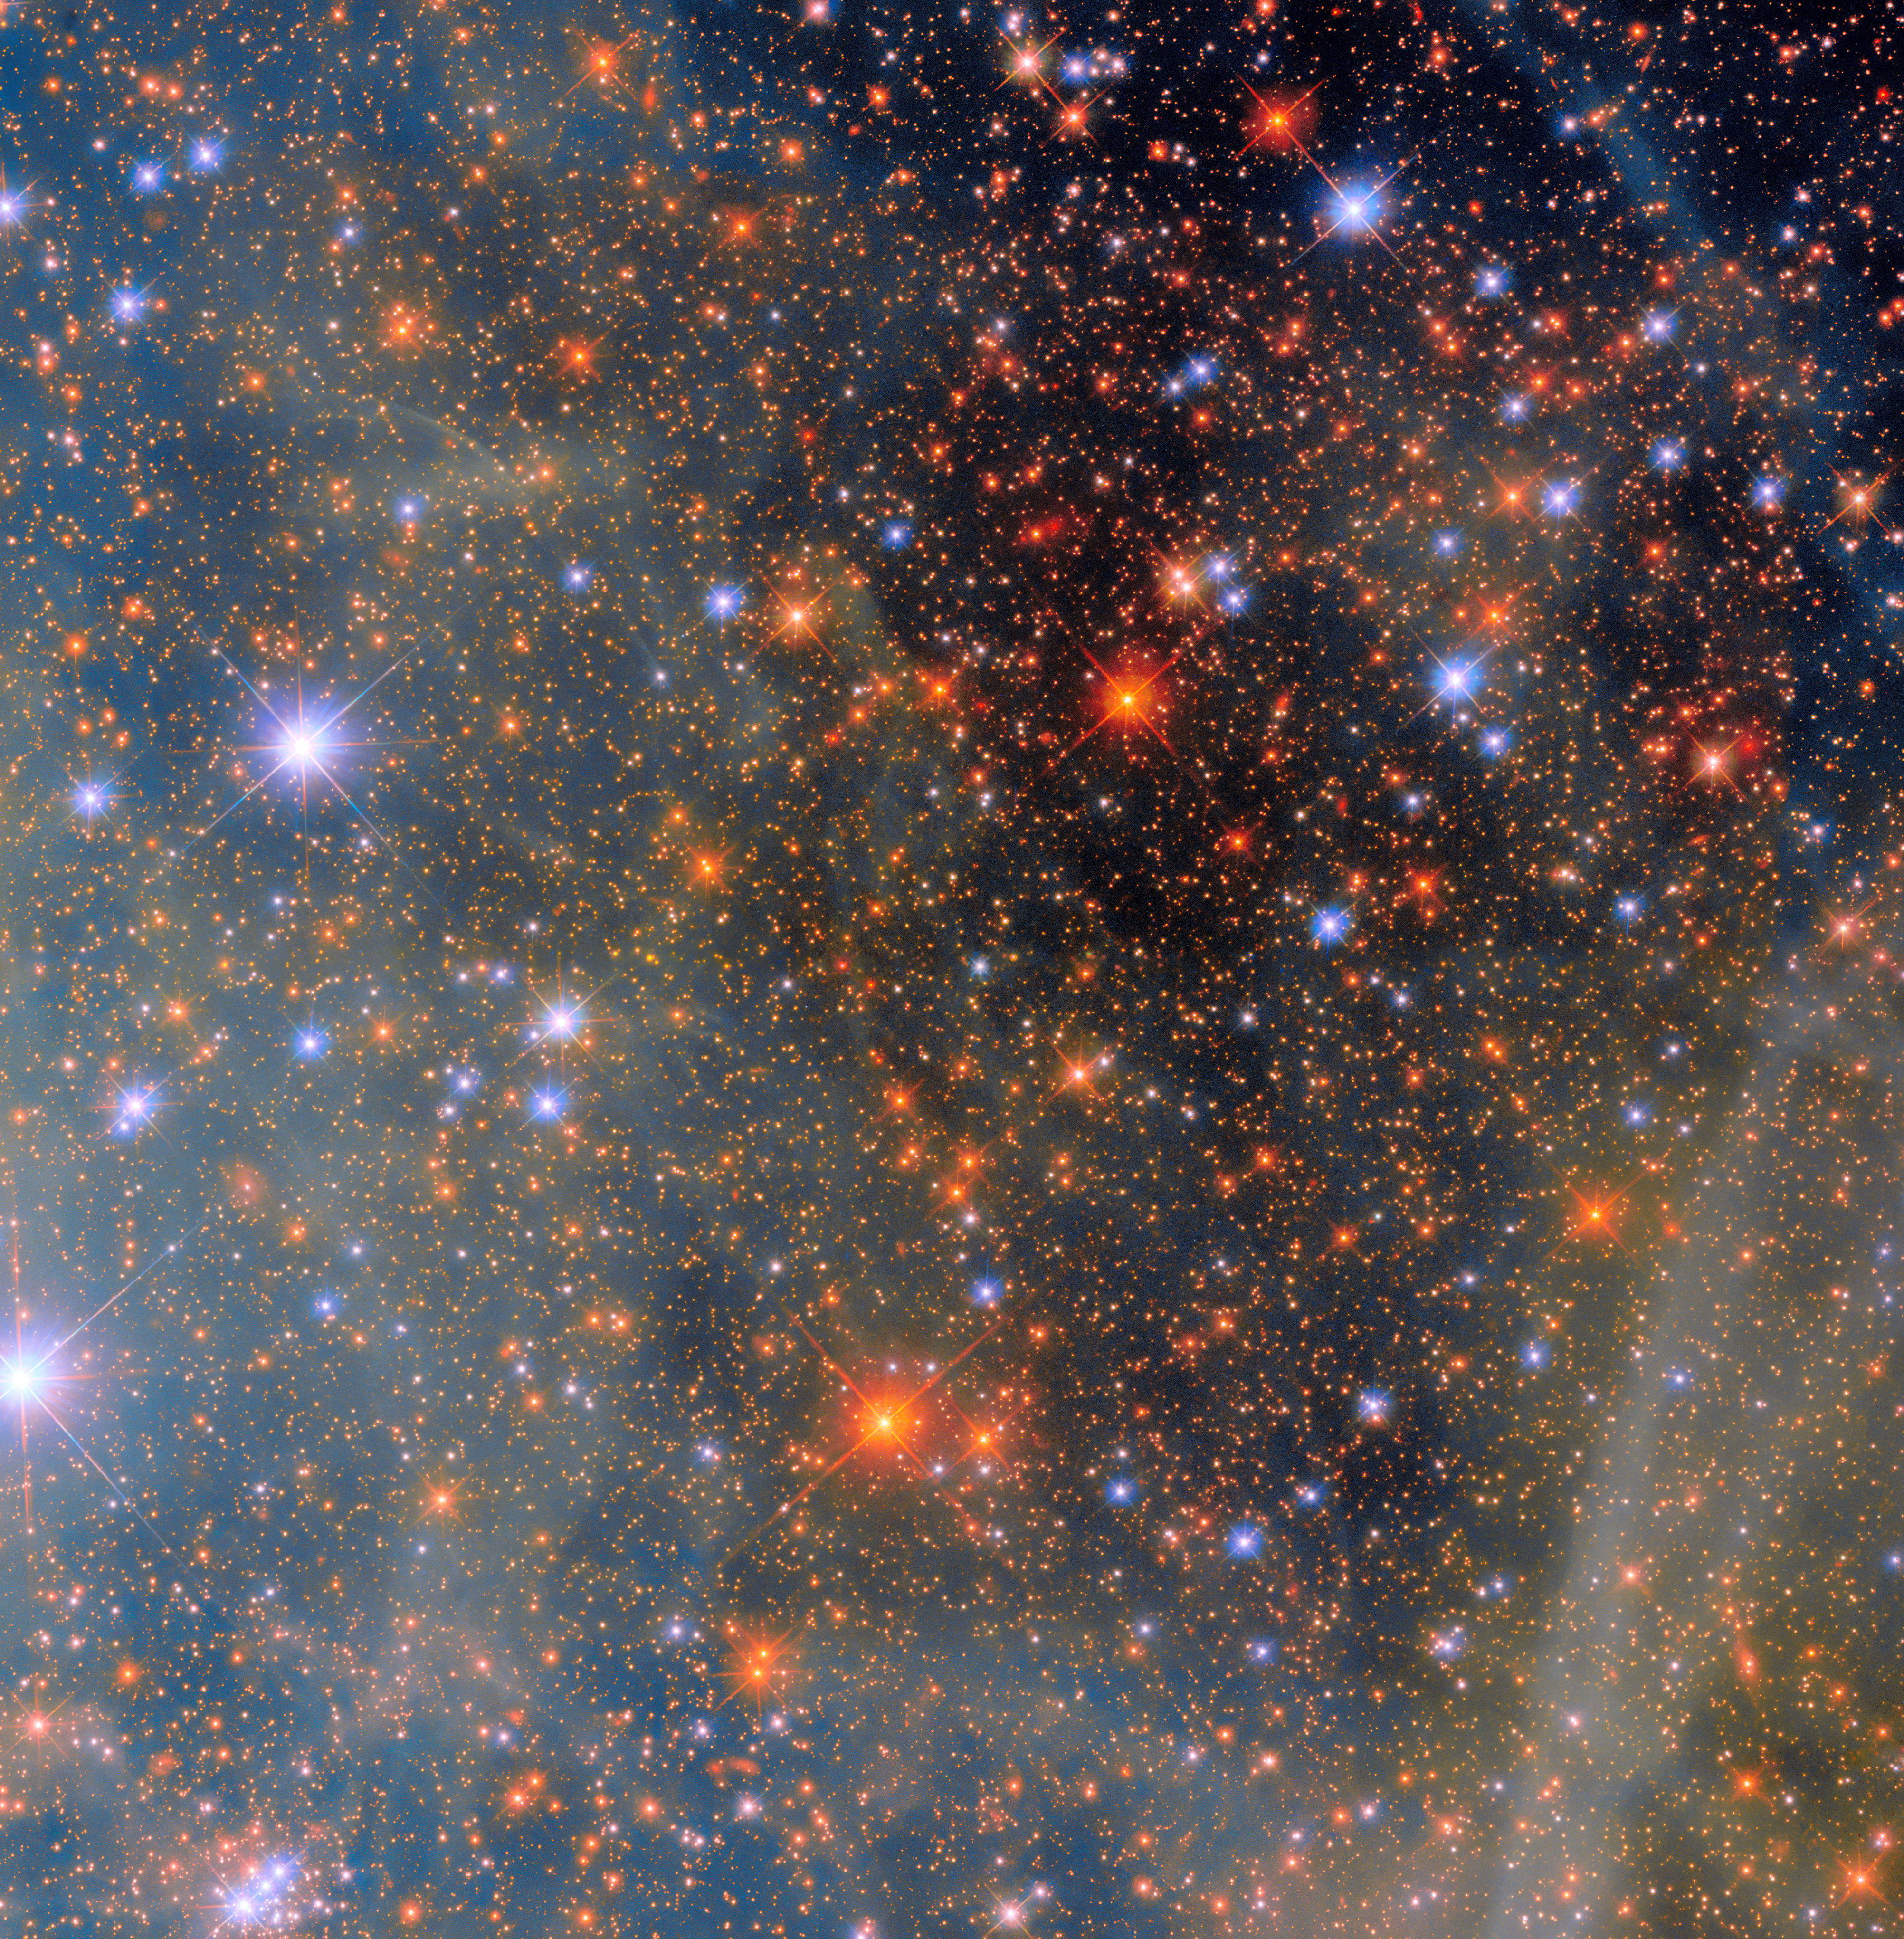

Colourful clouds of a nearby neighbour

Say hello to one of the Milky Way’s neighbours! Today’s NASA/ESA Hubble Space Telescope Picture of the Week features a scene from one of the closest galaxies to the Milky Way, the Small Magellanic Cloud (SMC). The SMC is a dwarf galaxy located about 200 000 light-years away. Most of the galaxy resides in the constellation Tucana, but a small section crosses over into the neighbouring constellation Hydrus.

Thanks to its proximity, the SMC is one of only a few galaxies that can be seen from Earth without the help of a telescope or binoculars. For viewers in the southern hemisphere and some latitudes in the northern hemisphere, the SMC resembles a piece of the Milky Way that has broken off, though in reality it’s much farther away than any part of our own galaxy.

With its 2.4-metre ‘eye’ and sensitive instruments, Hubble’s view of the SMC is far more detailed and vivid than what humans can see. Researchers used Hubble’s Wide Field Camera 3 instrument to observe this scene through four different filters. Each filter admits different wavelengths of light, creating a multicoloured view of dust clouds drifting across a field of stars. Hubble’s view, however, is much more zoomed-in than our eyes, the better for it to observe very distant objects. This image captures a small region of the SMC near the centre of NGC 346, a star cluster that is home to dozens of massive young stars.

Credit: ESA/Hubble & NASA, C. Murray